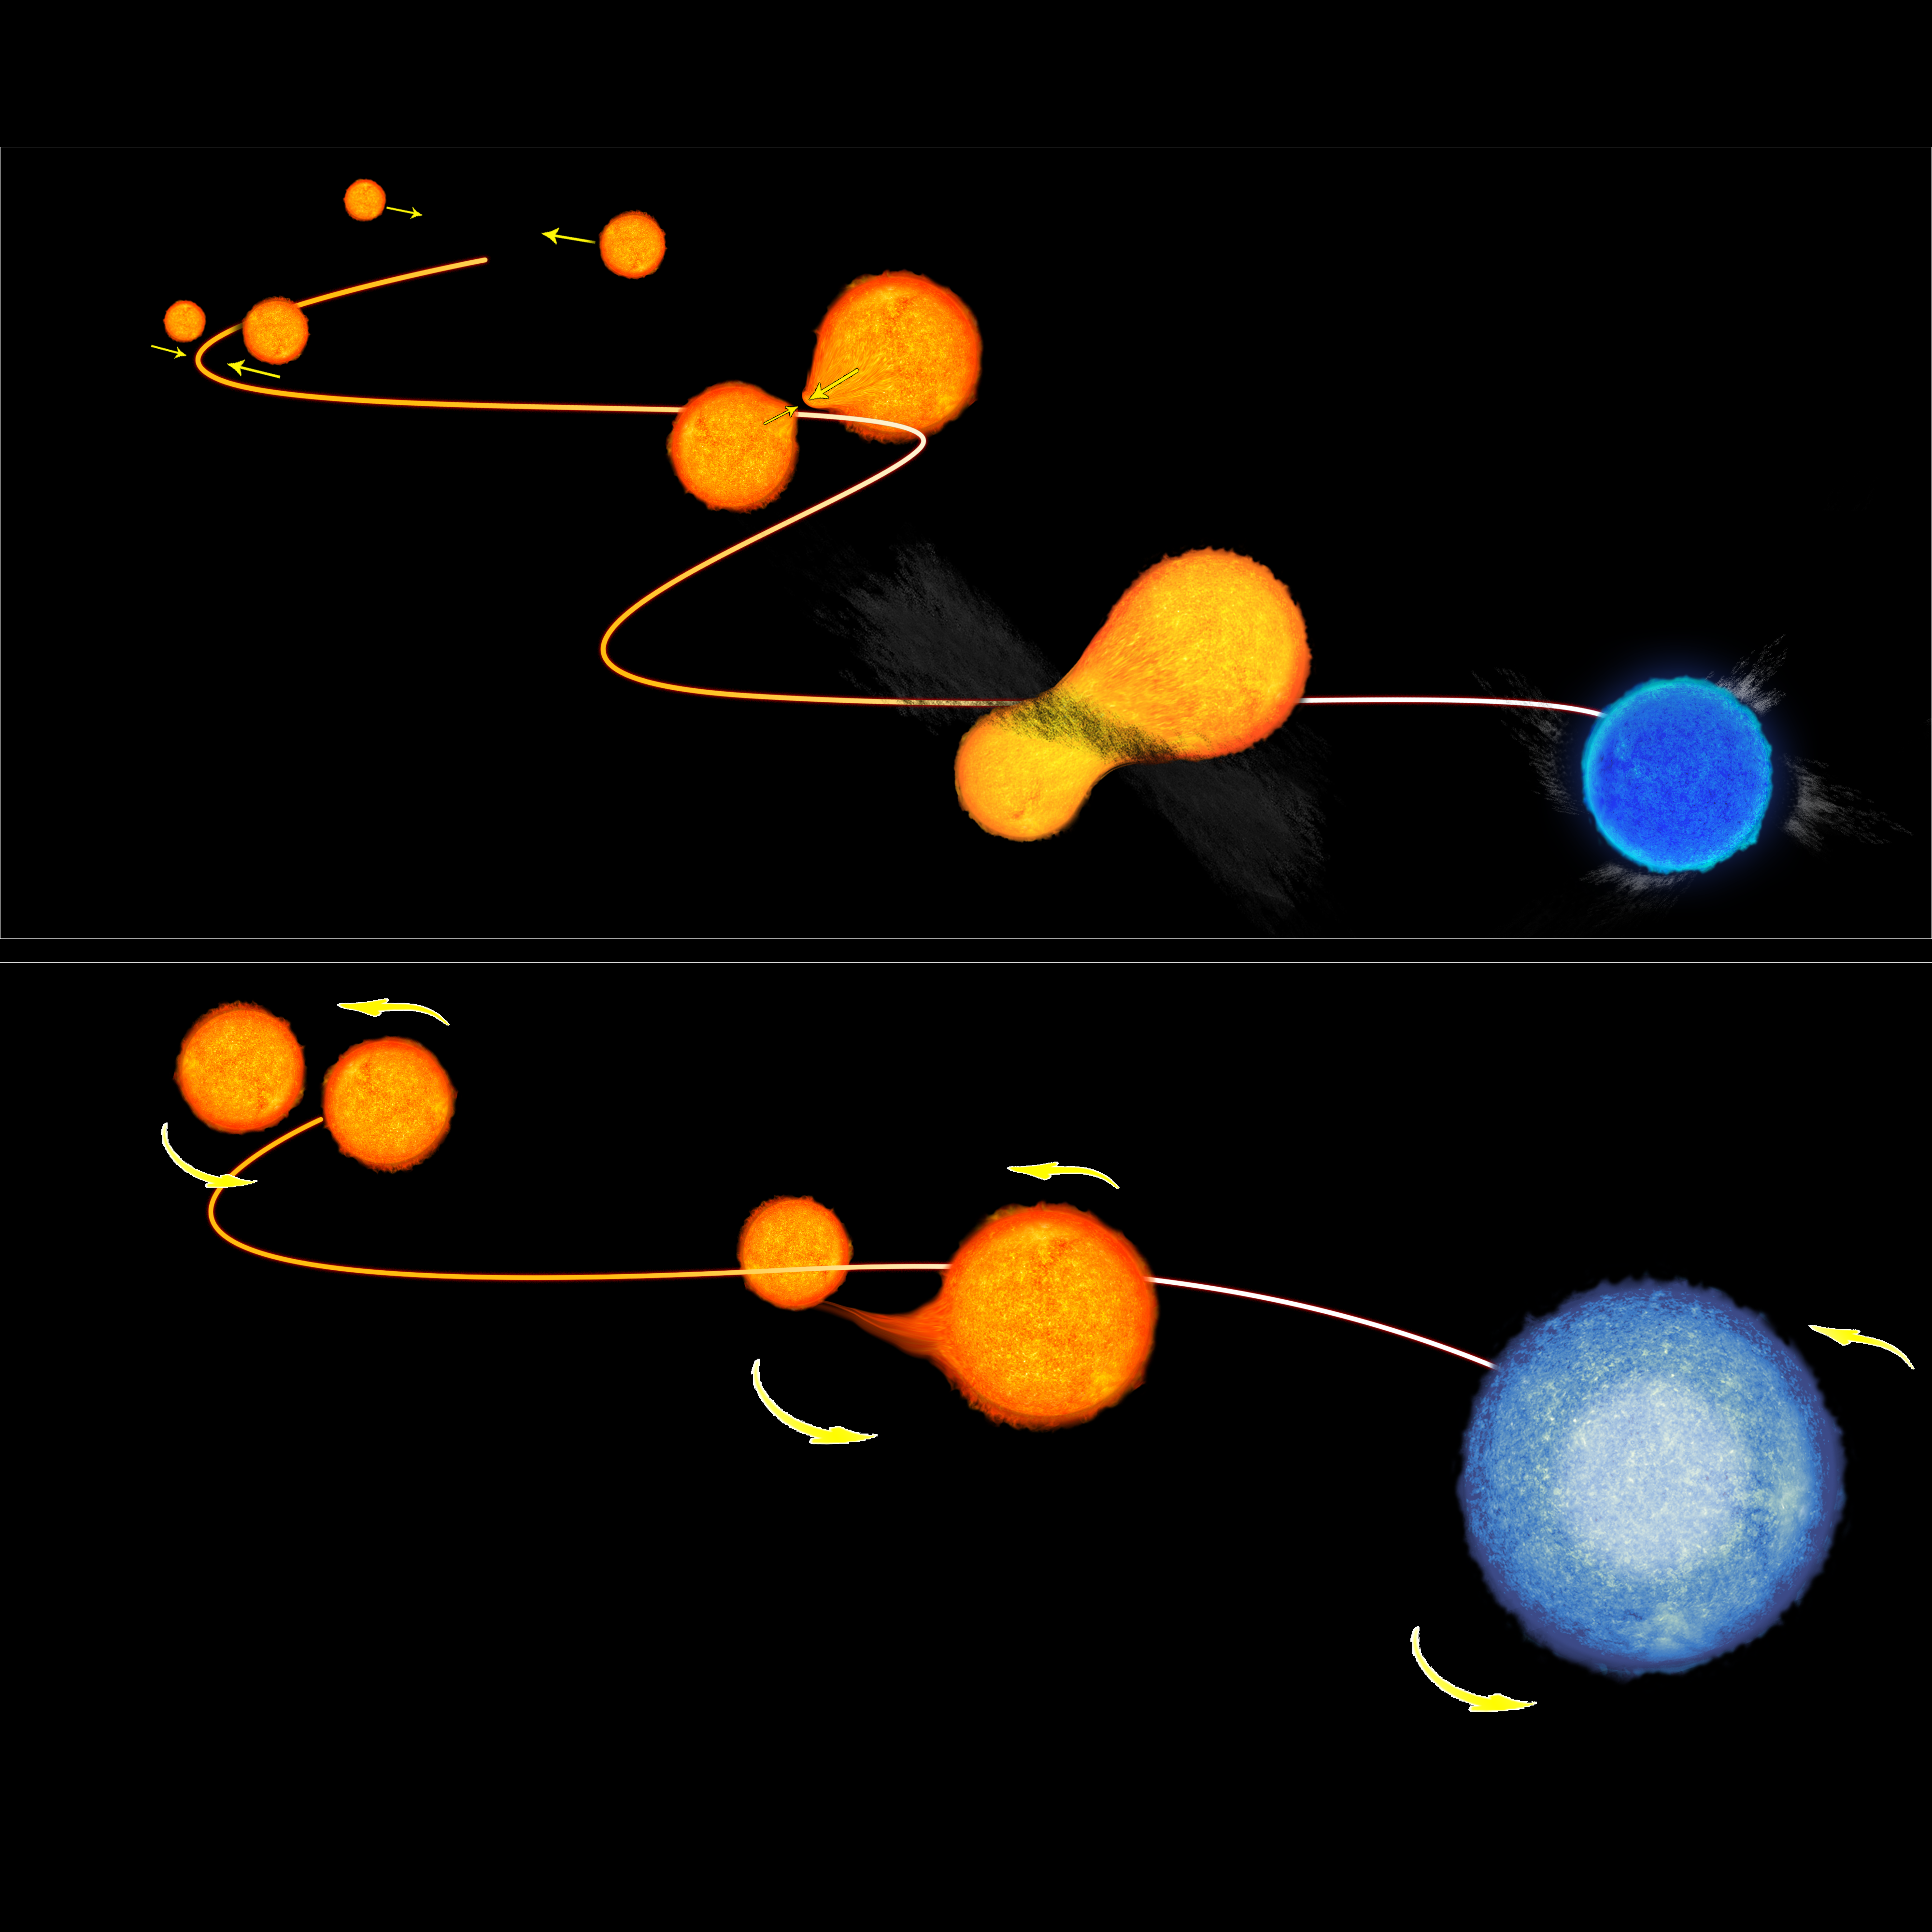

The formation of blue stragglers

This illustration demonstrates the two ways that blue stragglers — or "rejuvenated" stars — in globular clusters form. The upper illustration shows the collision model where two low-mass stars in an overcrowded environment experience a head-on collision, combining their fuel and mass and to form a single hot star. The lower illustration depicts the "vampire" model consisting of a pair of stars that undergo a transformation, with the lower-mass star draining its larger-mass companion of hydrogen that fuels its rebirth.

Credit: NASA/ ESA